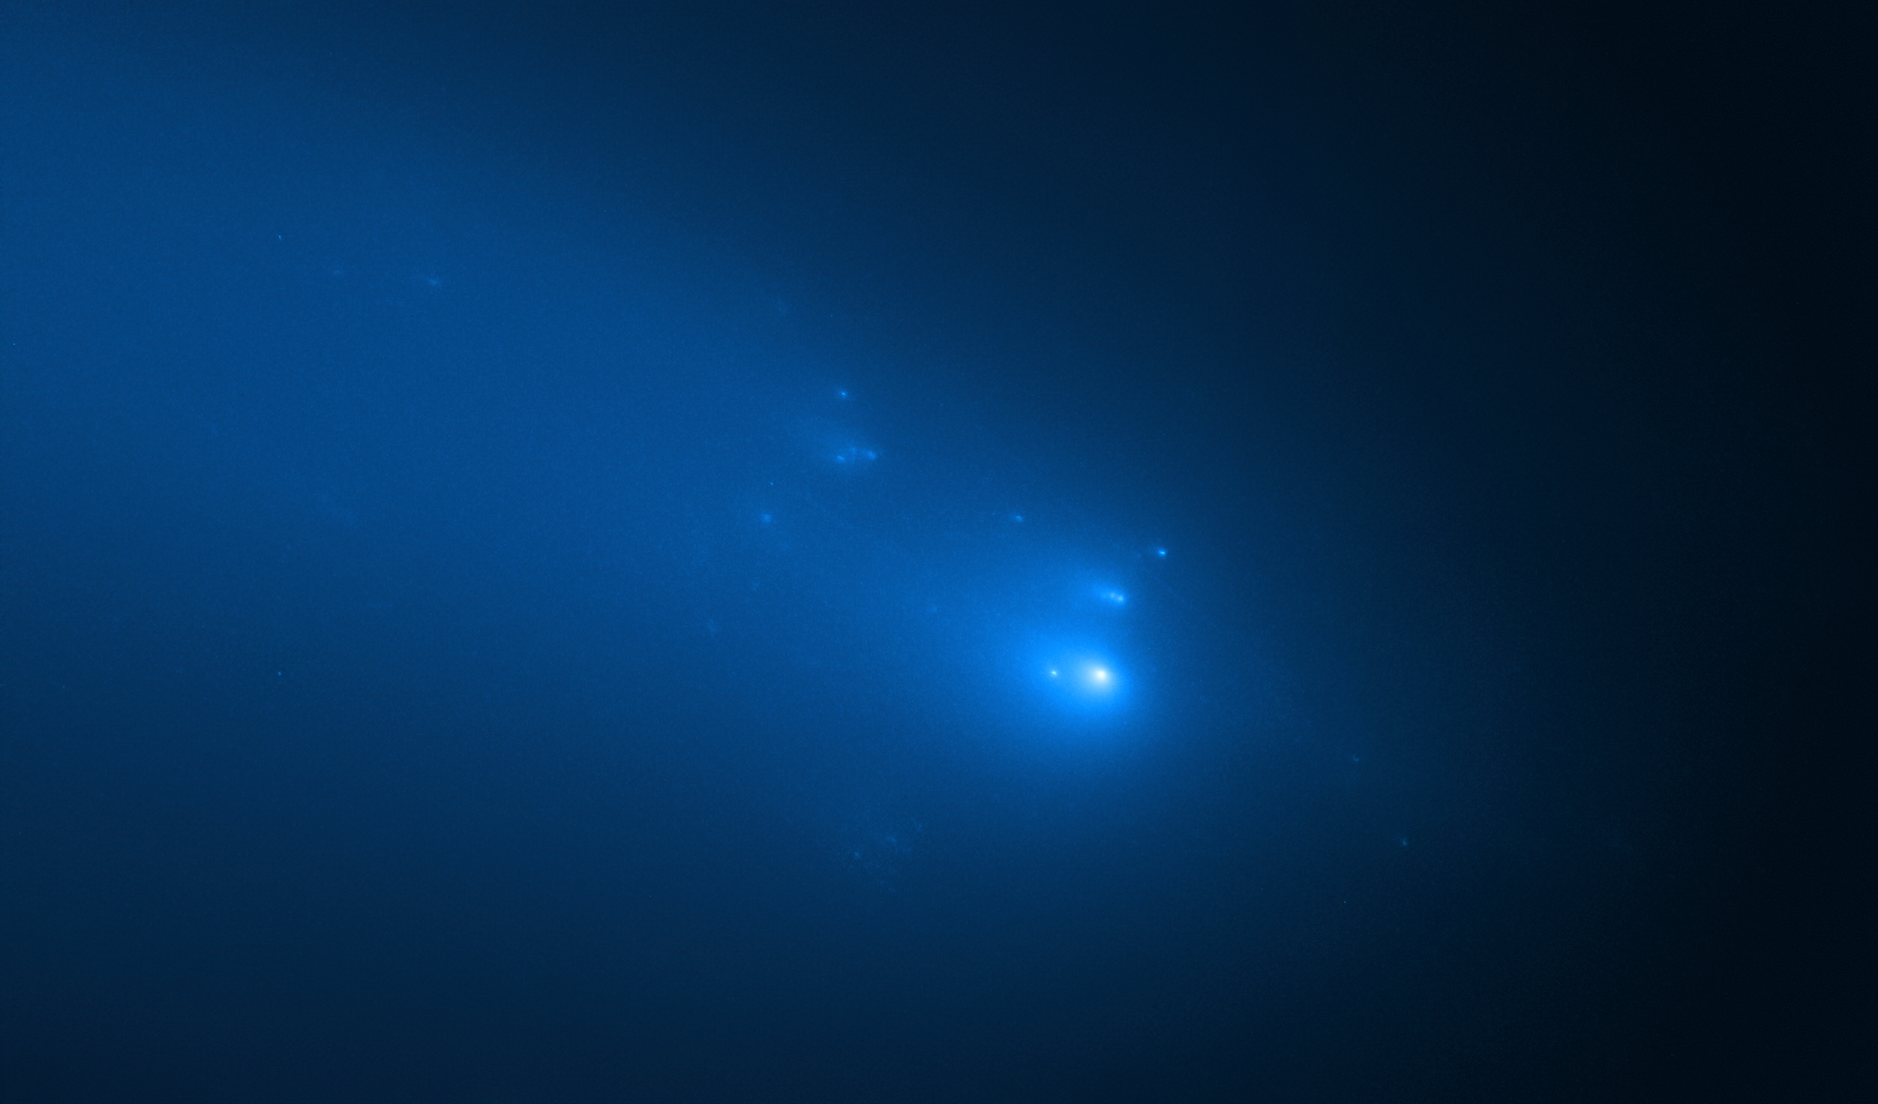

Hubble’s Observation of Comet C/2019 Y4 (ATLAS) on 23 April

The NASA/ESA Hubble Space Telescope has provided astronomers with the sharpest view yet of the breakup of Comet C/2019 Y4 (ATLAS). The telescope resolved roughly 25 fragments of the comet on 23 April.

The comet was first discovered in December 2019 by the ATLAS (Asteroid Terrestrial-impact Last Alert System) and its fragmentation was confirmed in April 2020.

Credit: NASA, ESA, D. Jewitt (UCLA), Q. Ye (University of Maryland)